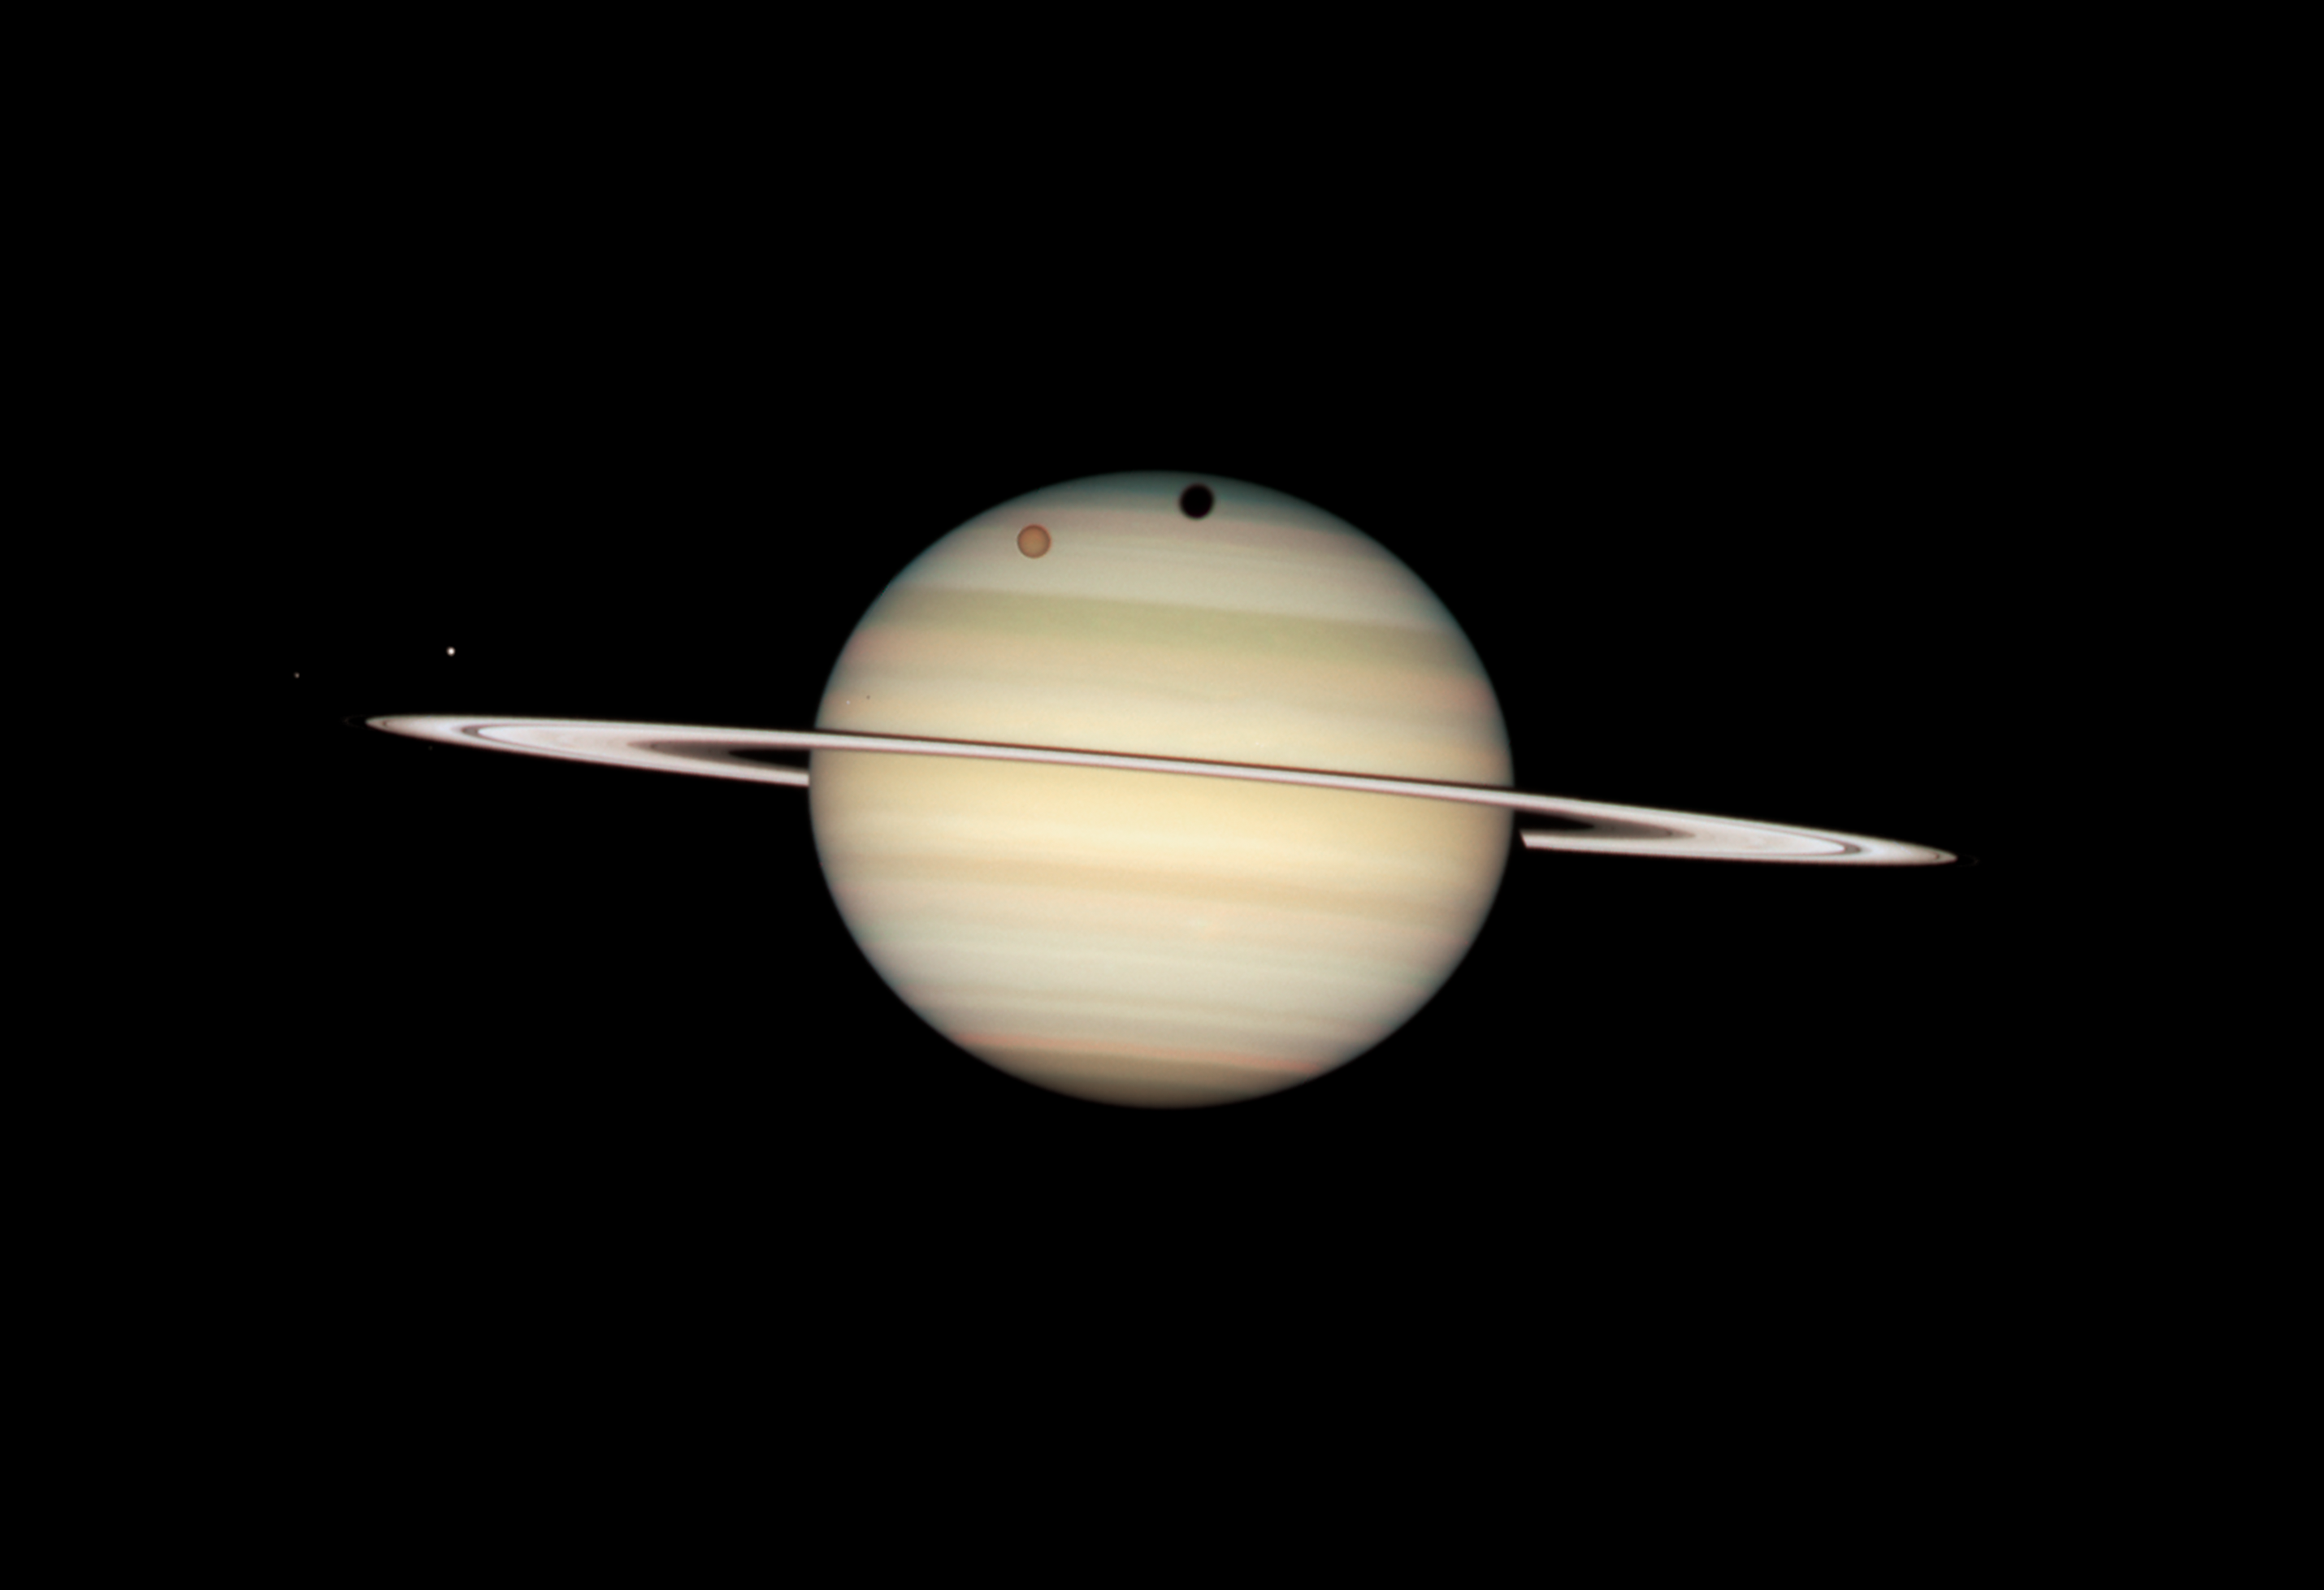

Quadruple Saturn moon transit snapped by Hubble

Hubble Space Telescope Image of Saturn: 24 February 2009 12:12 UT

Credit: NASA, ESA and the Hubble Heritage Team (STScI/AURA). Acknowledgment: M. Wong (STScI/UC Berkeley) and C. Go (Philippines)